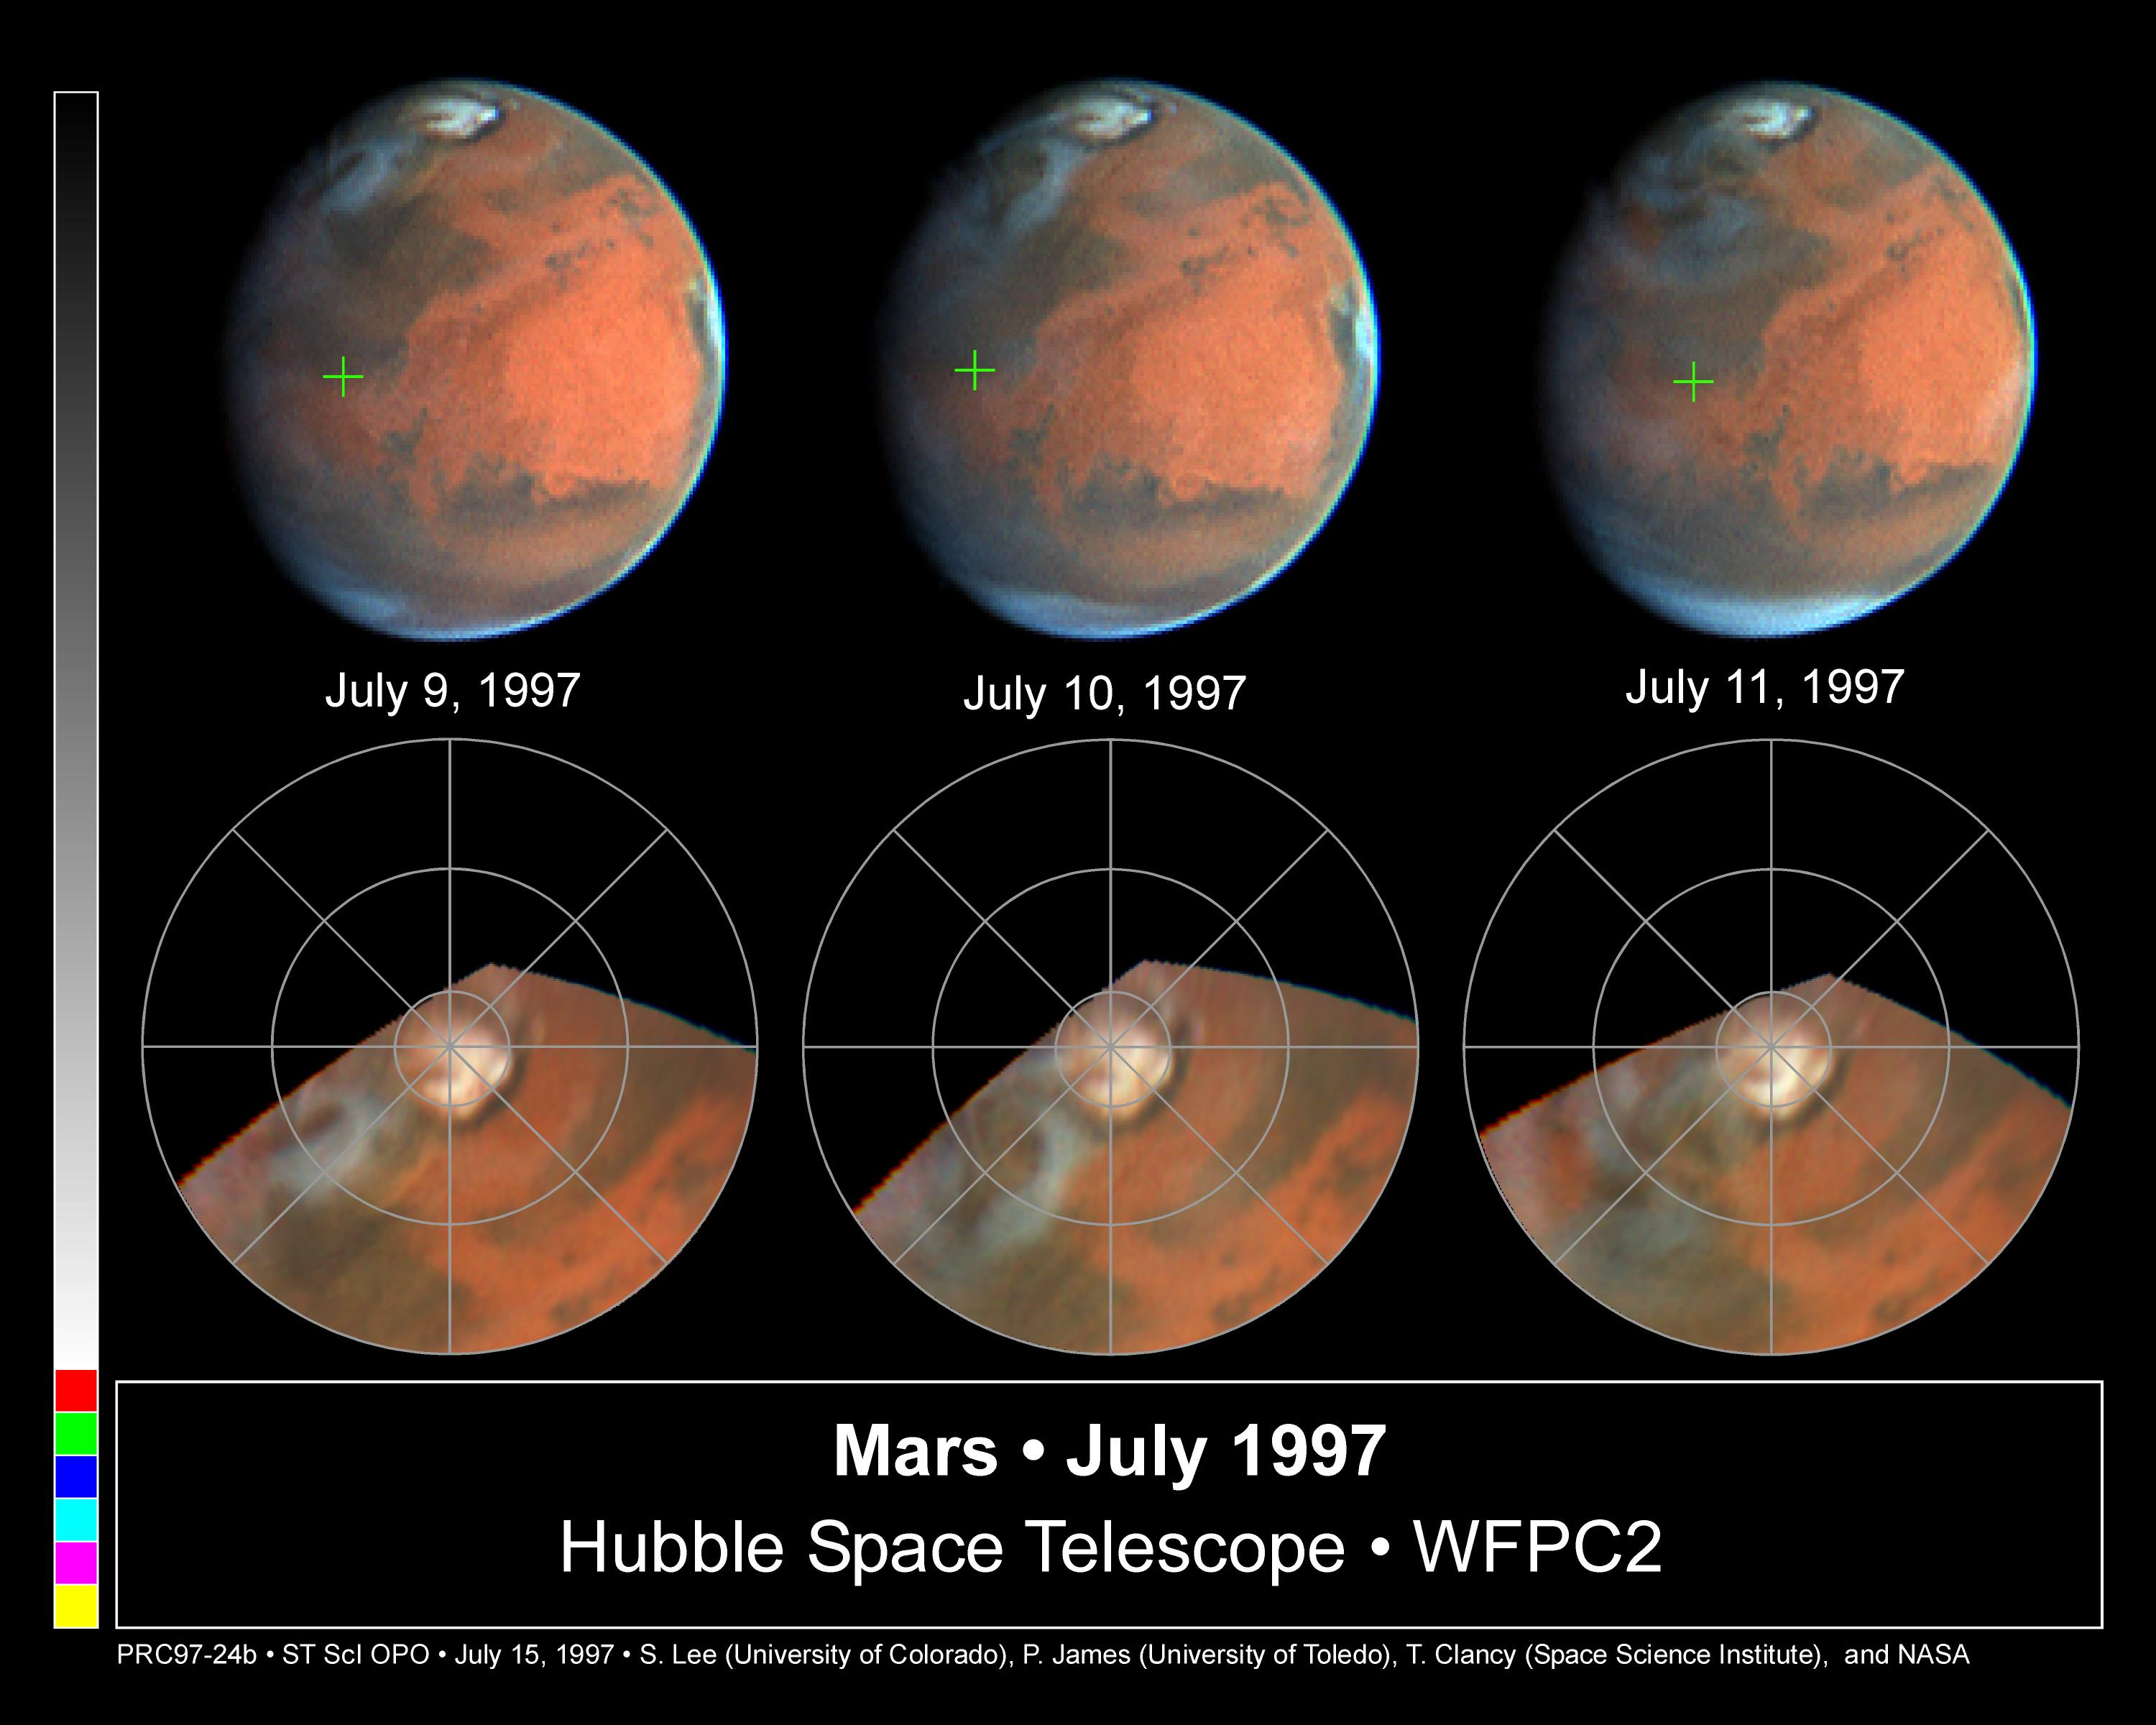

Rapid Weather Changes Observed on Mars

NASA/ESA Hubble Space Telescope images of Mars, obtained over three consecutive days between July 9 and 11, 1997, dramatically show that the behavior of dust and water-ice clouds exhibit substantial daily variations. The full-disk images are shown along the top (Pathfinder landing site marked by the green crosses), and maps of the North polar region are shown along the bottom. (The maps are oriented with 0 degrees longitude to the bottom, and extend from 40 degrees North latitude to the pole; latitude circles are shown at 40, 60, and 80 degrees, and lines of longitude are shown every 45 degrees.) About 24 hours separates each of the images.

Credit: Steve Lee (Univ. Colorado), Phil James (Univ. Toledo), and Todd Clancy (Space Science Inst.)